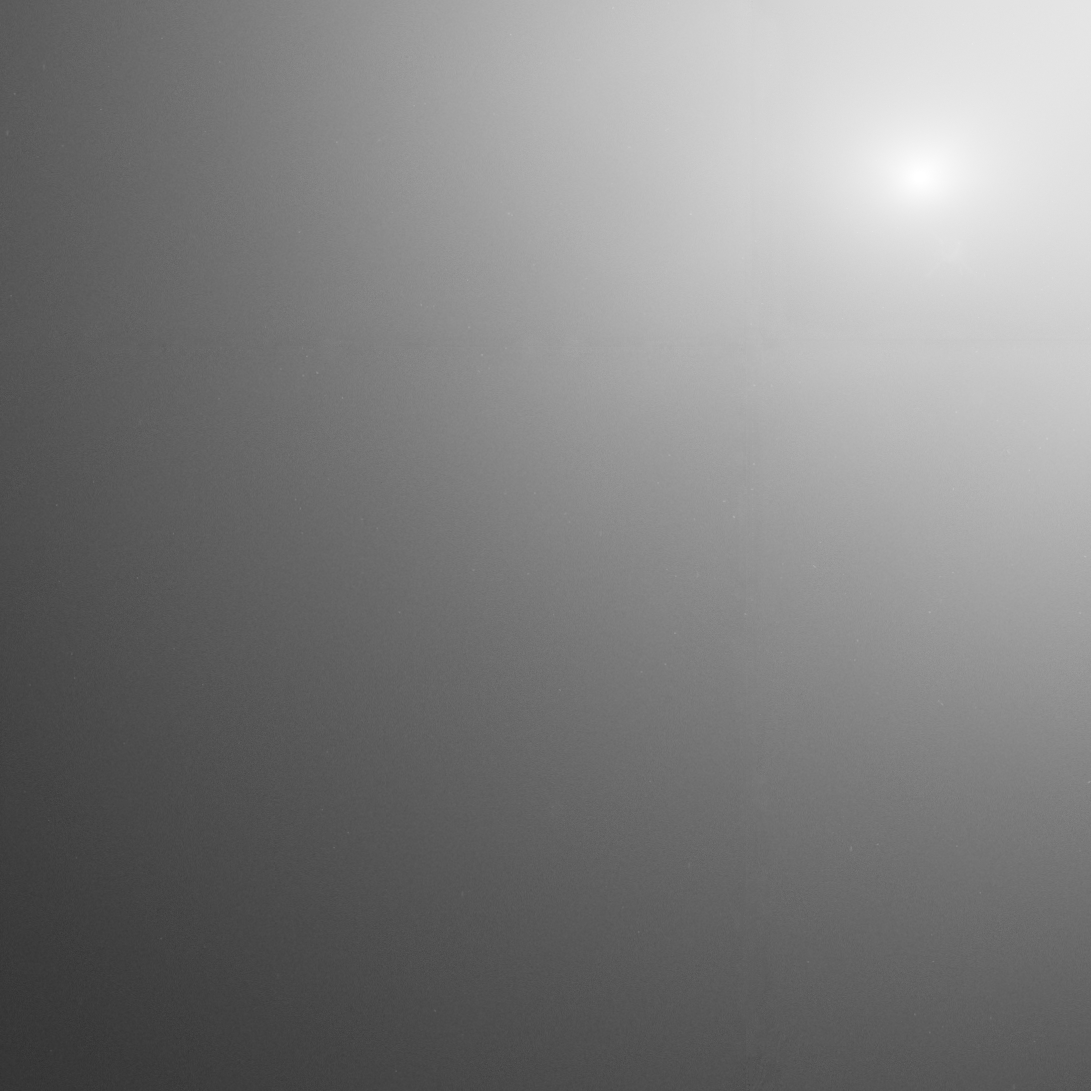

Comet 17P/Holmes Hubble image 1

This image taken by the NASA/ESA Hubble Space Telescope reveals Comet Holmes's bright core. It shows the coma, the cloud of dust and gas encircling the comet. The image was taken 29 Oct.

Credit: NASA,ESA, and H. Weaver (The Johns Hopkins University Applied Physics Laboratory)